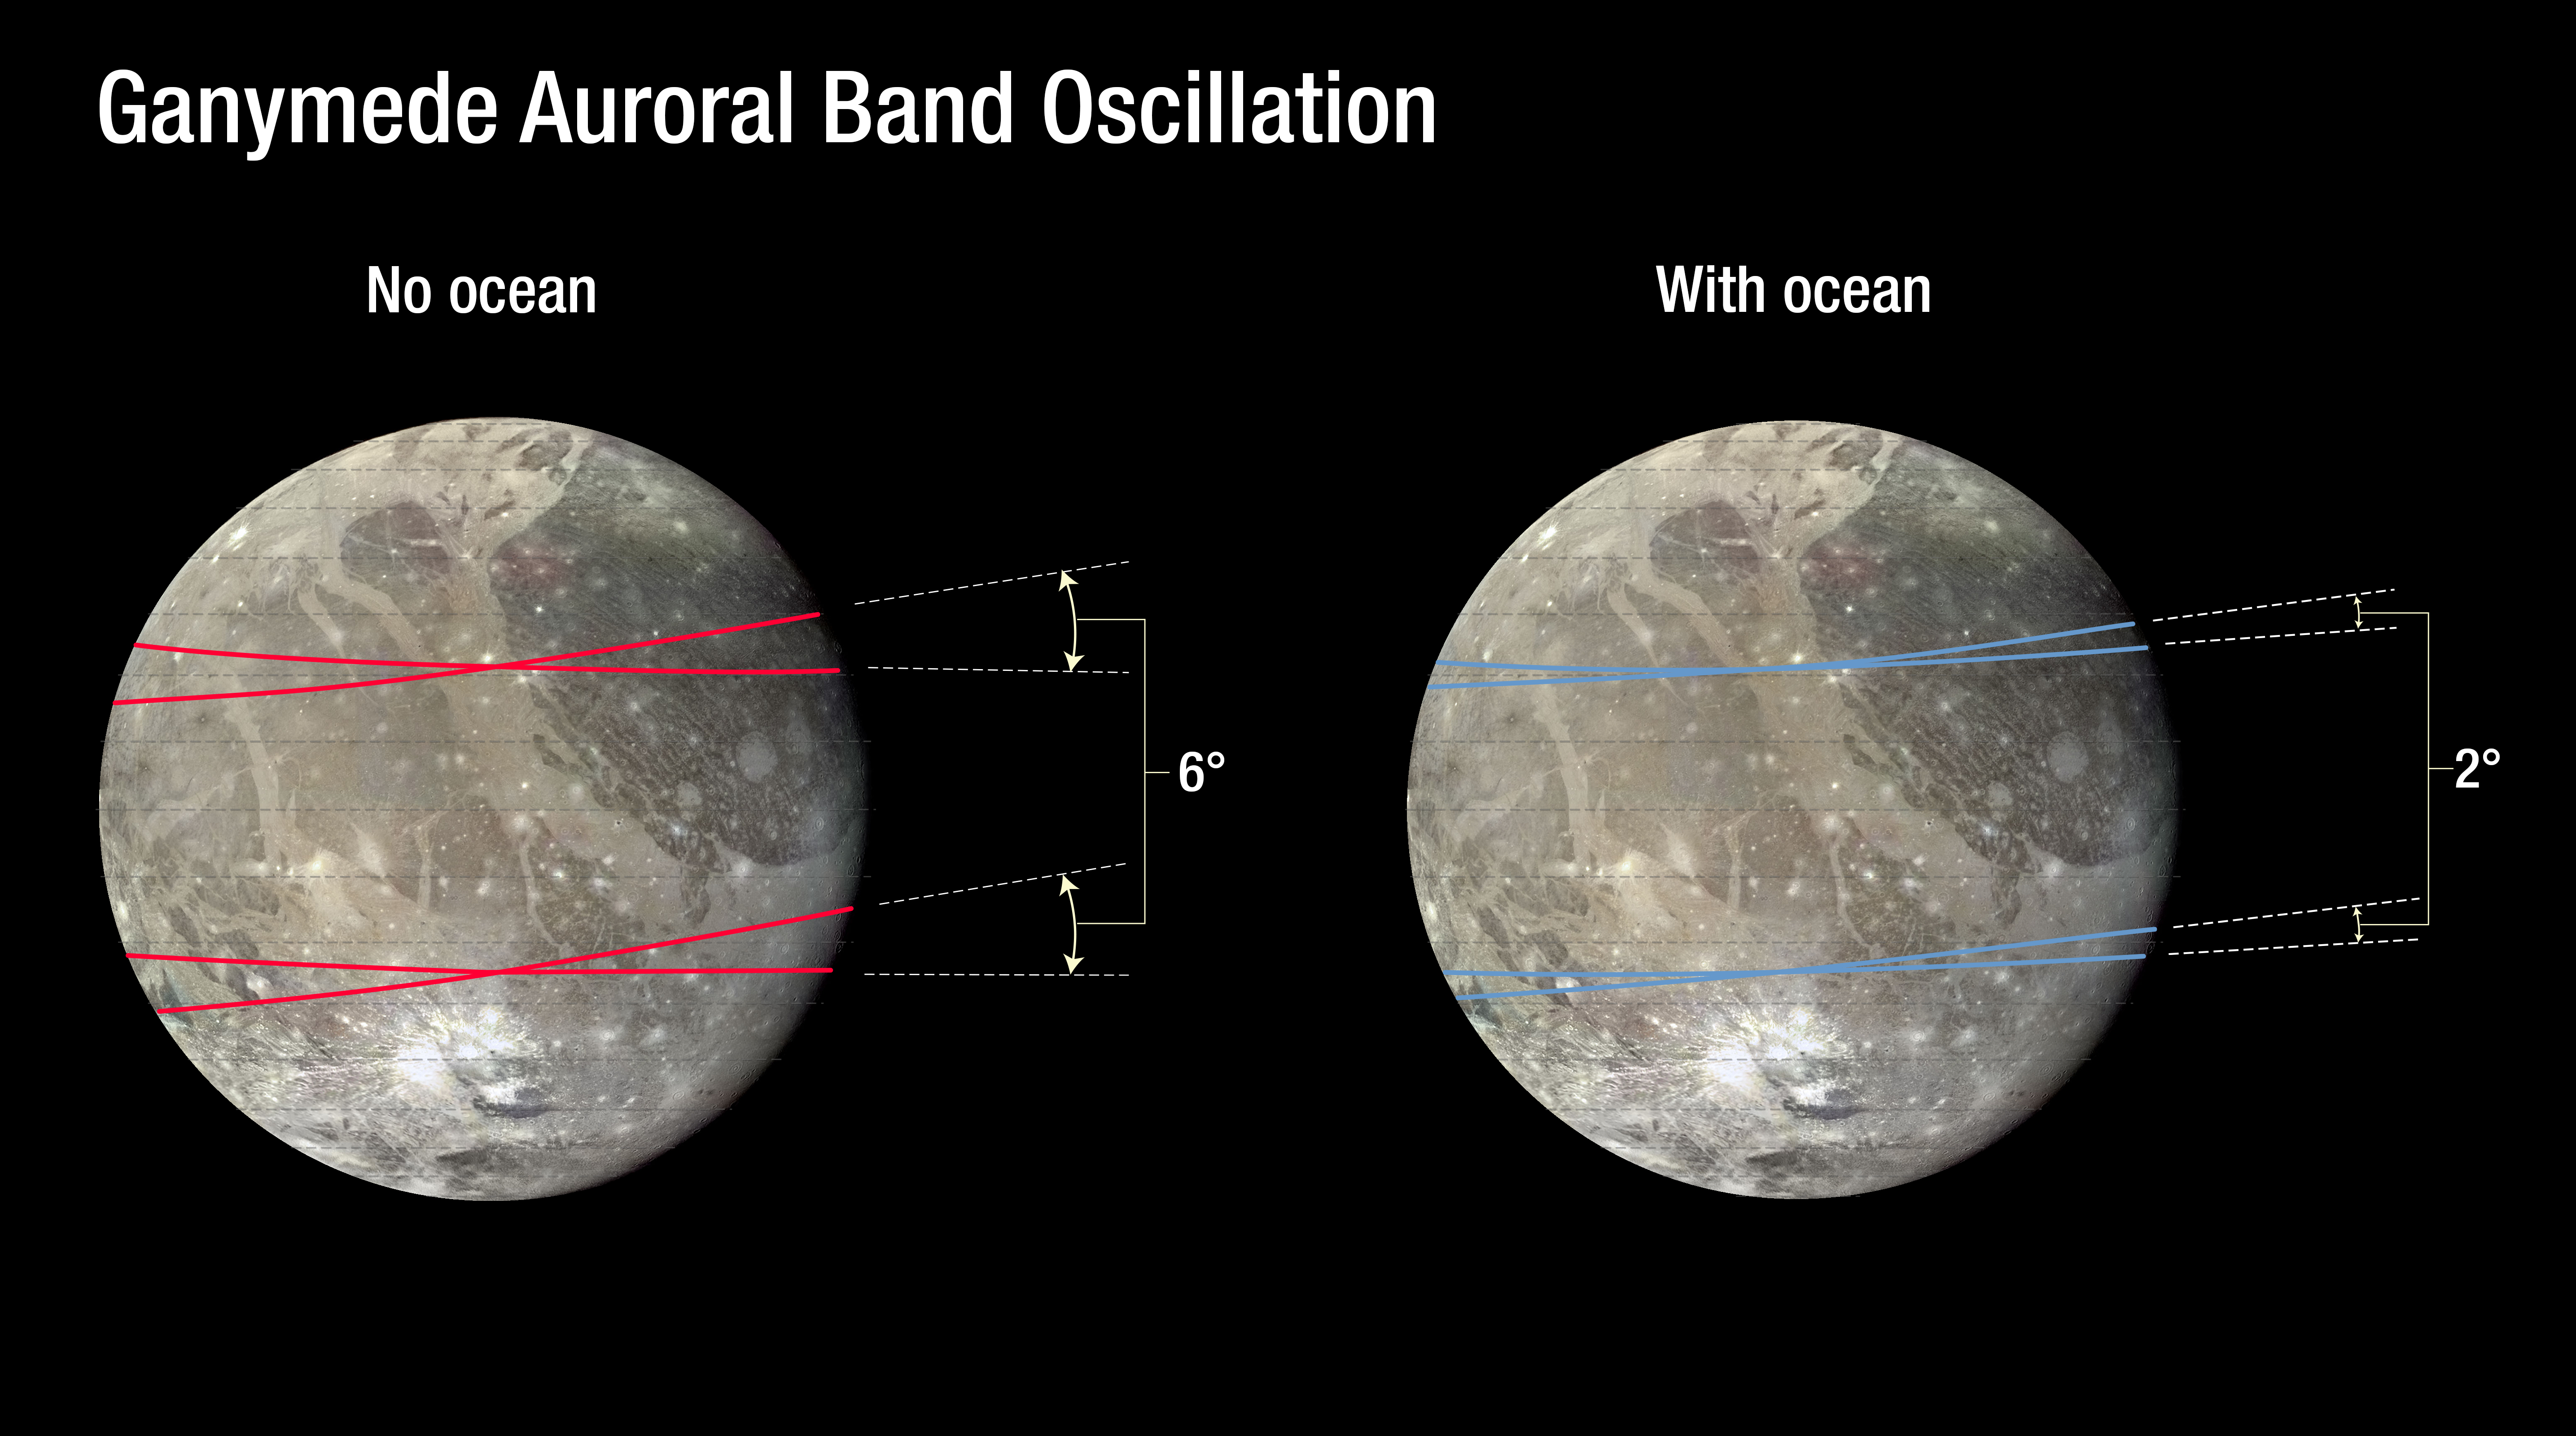

Plot of the rocking of Ganymede’s magnetic field

This chart plots the excursion of a pair of auroral belts on Jupiter's moon Ganymede. Their motion provides insight into the moon's interior. Ganymede has a magnetic field produced by an iron core but because Ganymede is close to Jupiter, it is also embedded in Jupiter's own magnetic field.

When Jupiter's magnetic field changes, the aurorae on Ganymede also change, "rocking" back and forth. This amount of rocking is inhibited if the moon has a subsurface ocean. By watching the rocking motion of the two aurorae, scientists were able to determine that a large amount of saltwater exists beneath Ganymede's crust, affecting its magnetic field.

Credit: NASA, ESA, and A. Feild (STScI)